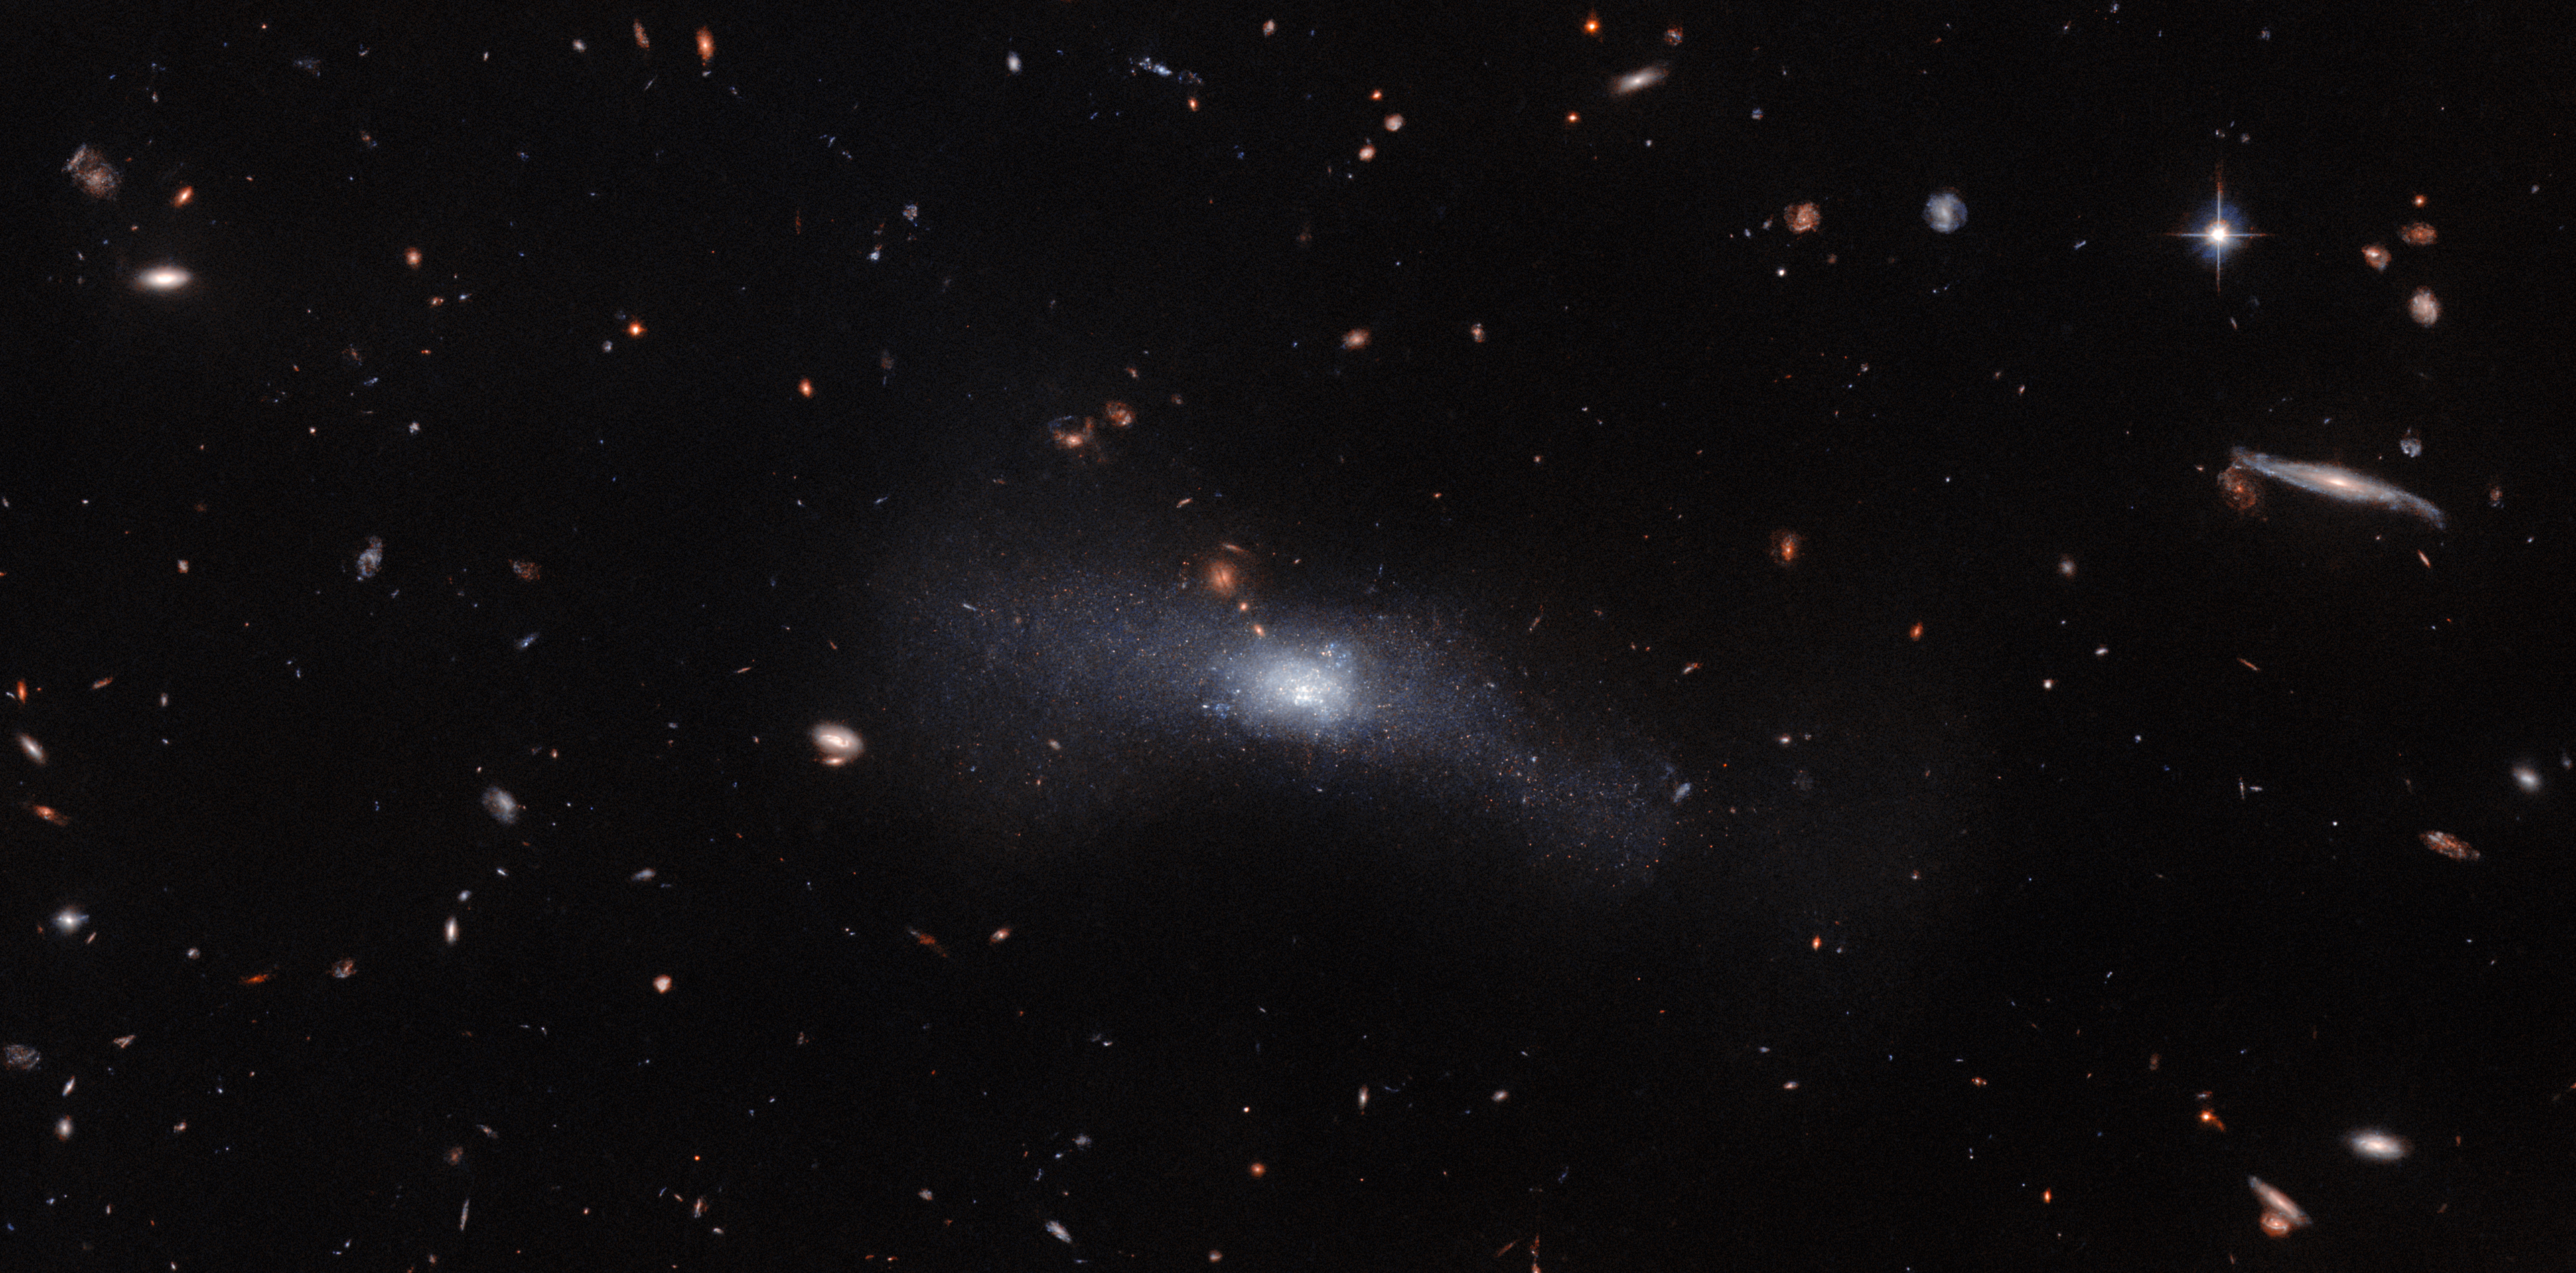

What’s in a name?

This Hubble Picture of the Week includes the pithily-named galaxy SDSS J103512.07+461412.2, visible in the centre of this image as a dispersed sweep of dust and stars with a denser, brighter core. SDSS J103512.07+461412.2 is located 23 million light-years from Earth in the constellation Ursa Major. The seemingly rambling name is because this galaxy was observed as part of the Sloan Digital Sky Survey (SDSS), a massive survey that began in 2000 with the aim of observing and cataloguing vast numbers of astronomical objects. So far, it has recorded several hundred million astronomical objects.

In the early days of astronomy catalogues, astronomers painstakingly recorded individual objects one by one. As an example, the Messier catalogue includes only 110 objects, identified by the astronomer Charles Messier because they were all getting in the way of his comet-hunting efforts. As the Messier catalogue is so limited, it is sufficient to simply refer to those objects as M1 to M110. In contrast, when a survey as massive in scope as the SDSS is involved, and when huge volumes of data need to be processed in an automated manner, the names assigned to objects need to be both longer, and more informative.

To that end, every SDSS object has a designation that follows the format of: ‘SDSS J’, followed by the right ascension (RA), and then the declination (Dec). RA and Dec define the position of an astronomical object in the night sky. RA is analogous to longitude here on Earth, whilst the Dec corresponds to latitude. To be more exact, RA measures the longitudinal distance of an astronomical object from the point where the celestial equator (the mid-point between the north and south celestial poles) intersects with the ecliptic (the plane in which Earth orbits around the Sun). The entire night sky is then carved into 24 slices, known as ‘hours’, measured eastwards from that starting point (which is designated as zero hour). This means that the RA can be expressed in ‘hours’, ‘minutes’ and ‘seconds’. Dec is the angle north or south of the celestial equator, and is expressed in degrees. The RA and Dec of the objects featured in each Hubble Picture of the Week can be found on the lower right side of the webpage!

Thus, the SDSS J103512.07+461412.2 name simply tells us that the galaxy can be found 10 hours, 35 minutes and 12 seconds east of the zero-hour point on the celestial equator, and just over 46 degrees to the north of the celestial equator. So that lengthy name is really an identifier and a detailed location in one!

Credit: ESA/Hubble & NASA, R. Tully